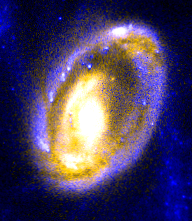

The cartwheel galaxy

This close-up image of the galaxy's nucleus reveals the comet-like knots of gas. These knots are mostly confined to the core's left side and appear as white streaks inside the blue ring.

Credit: Curt Struck and Philip Appleton (Iowa State University), Kirk Borne (Hughes STX Corporation), and Ray Lucas ( Space Telescope Science Institute), and NASA/ESA